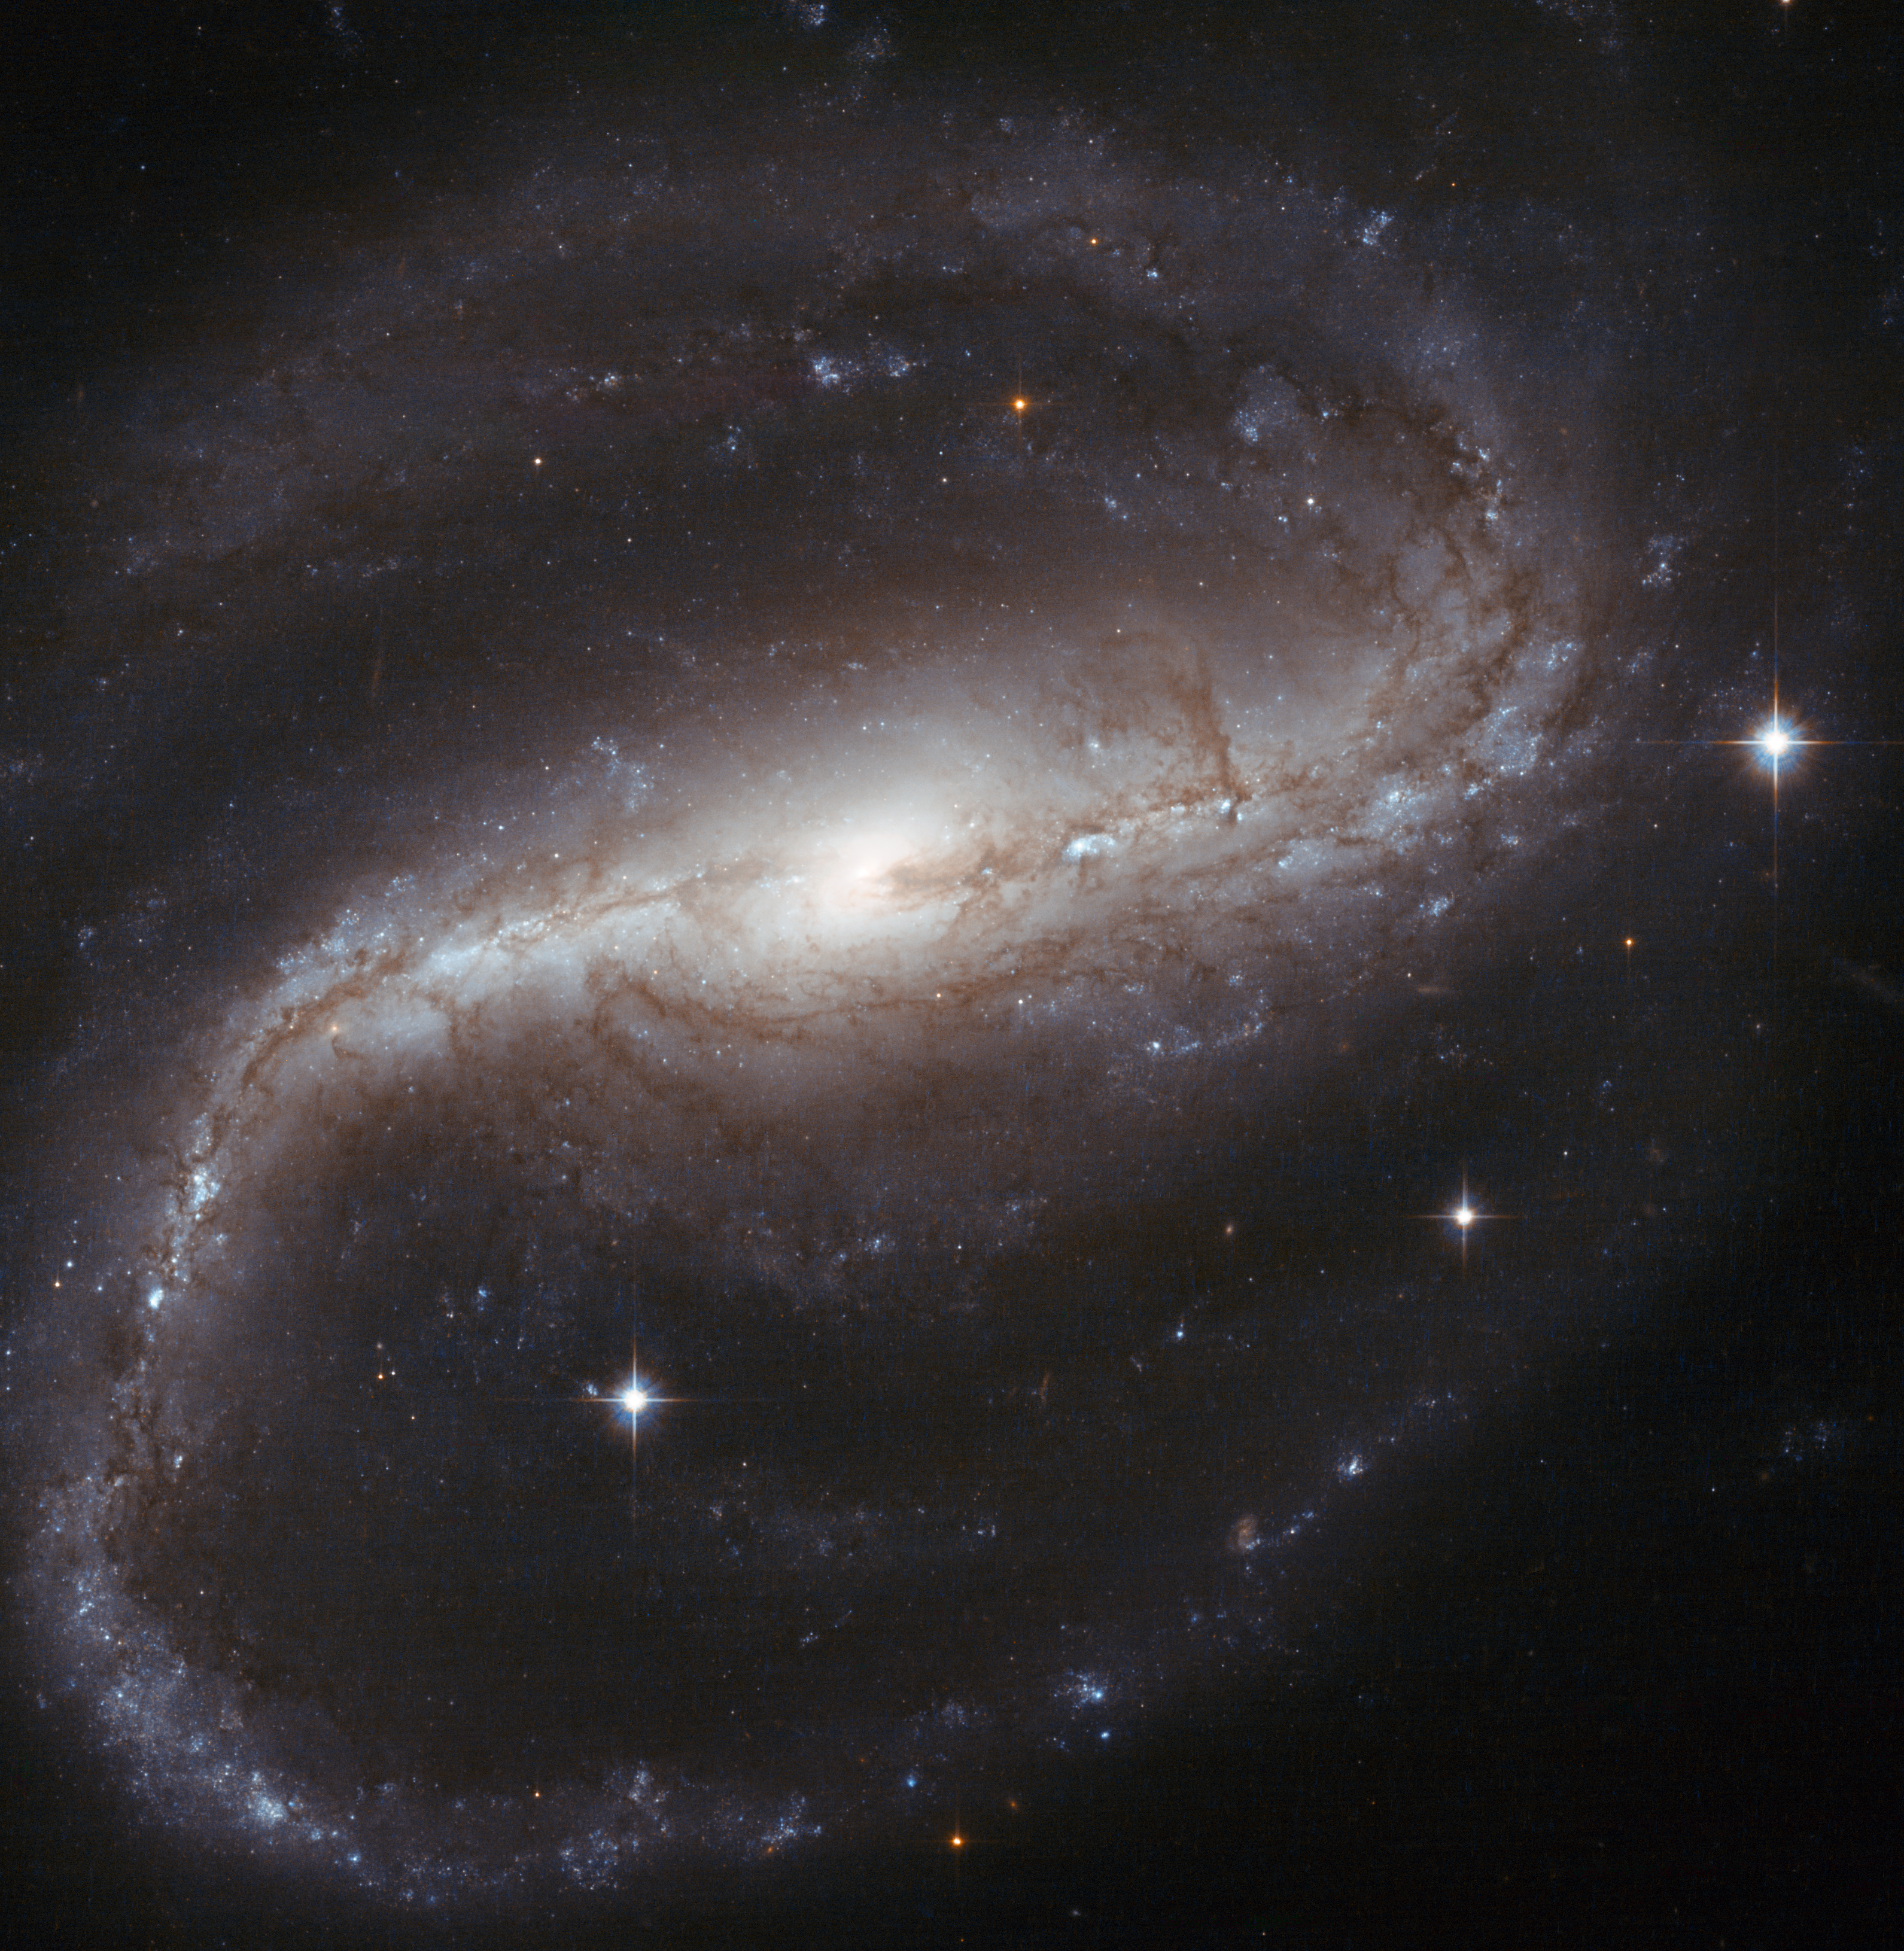

Spiral spins both ways

In this NASA/ESA Hubble Space Telescope image of NGC 7479 — created from observations at visible and near-infrared wavelengths — the tightly wound arms of the spiral galaxy create an inverted ‘S’, as they spin in an anticlockwise direction. However, at radio wavelengths, this galaxy, sometimes nicknamed the Propeller Galaxy, spins the other way, with a jet of radiation that bends in the opposite direction to the stars and dust in the arms of the galaxy.

Astronomers think that the radio jet in NGC 7479 was put into its bizarre backwards spin following a merger with another galaxy.

Star formation is reignited by galactic collisions, and indeed NGC 7479 is undergoing starburst activity, with many bright, young stars visible in the spiral arms and disc. The three brightest stars in this image, however, are foreground stars — caught on camera because they lie between the galaxy and Hubble.

This striking galaxy is easily visible in moderate telescopes as an elongated fuzzy patch of light. The spiral arms can be seen with more difficulty in larger telescopes under dark conditions.

This picture was created from images taken with the Wide Field Channel of Hubble’s Advanced Camera for Surveys. Images through a yellow filter (F555W, coloured blue) were combined with images taken in the near-infrared (F814W, coloured red). The total exposure times were 520 s per filter and the field of view is 2.7 arcminutes across.

Credit: ESA/Hubble & NASA